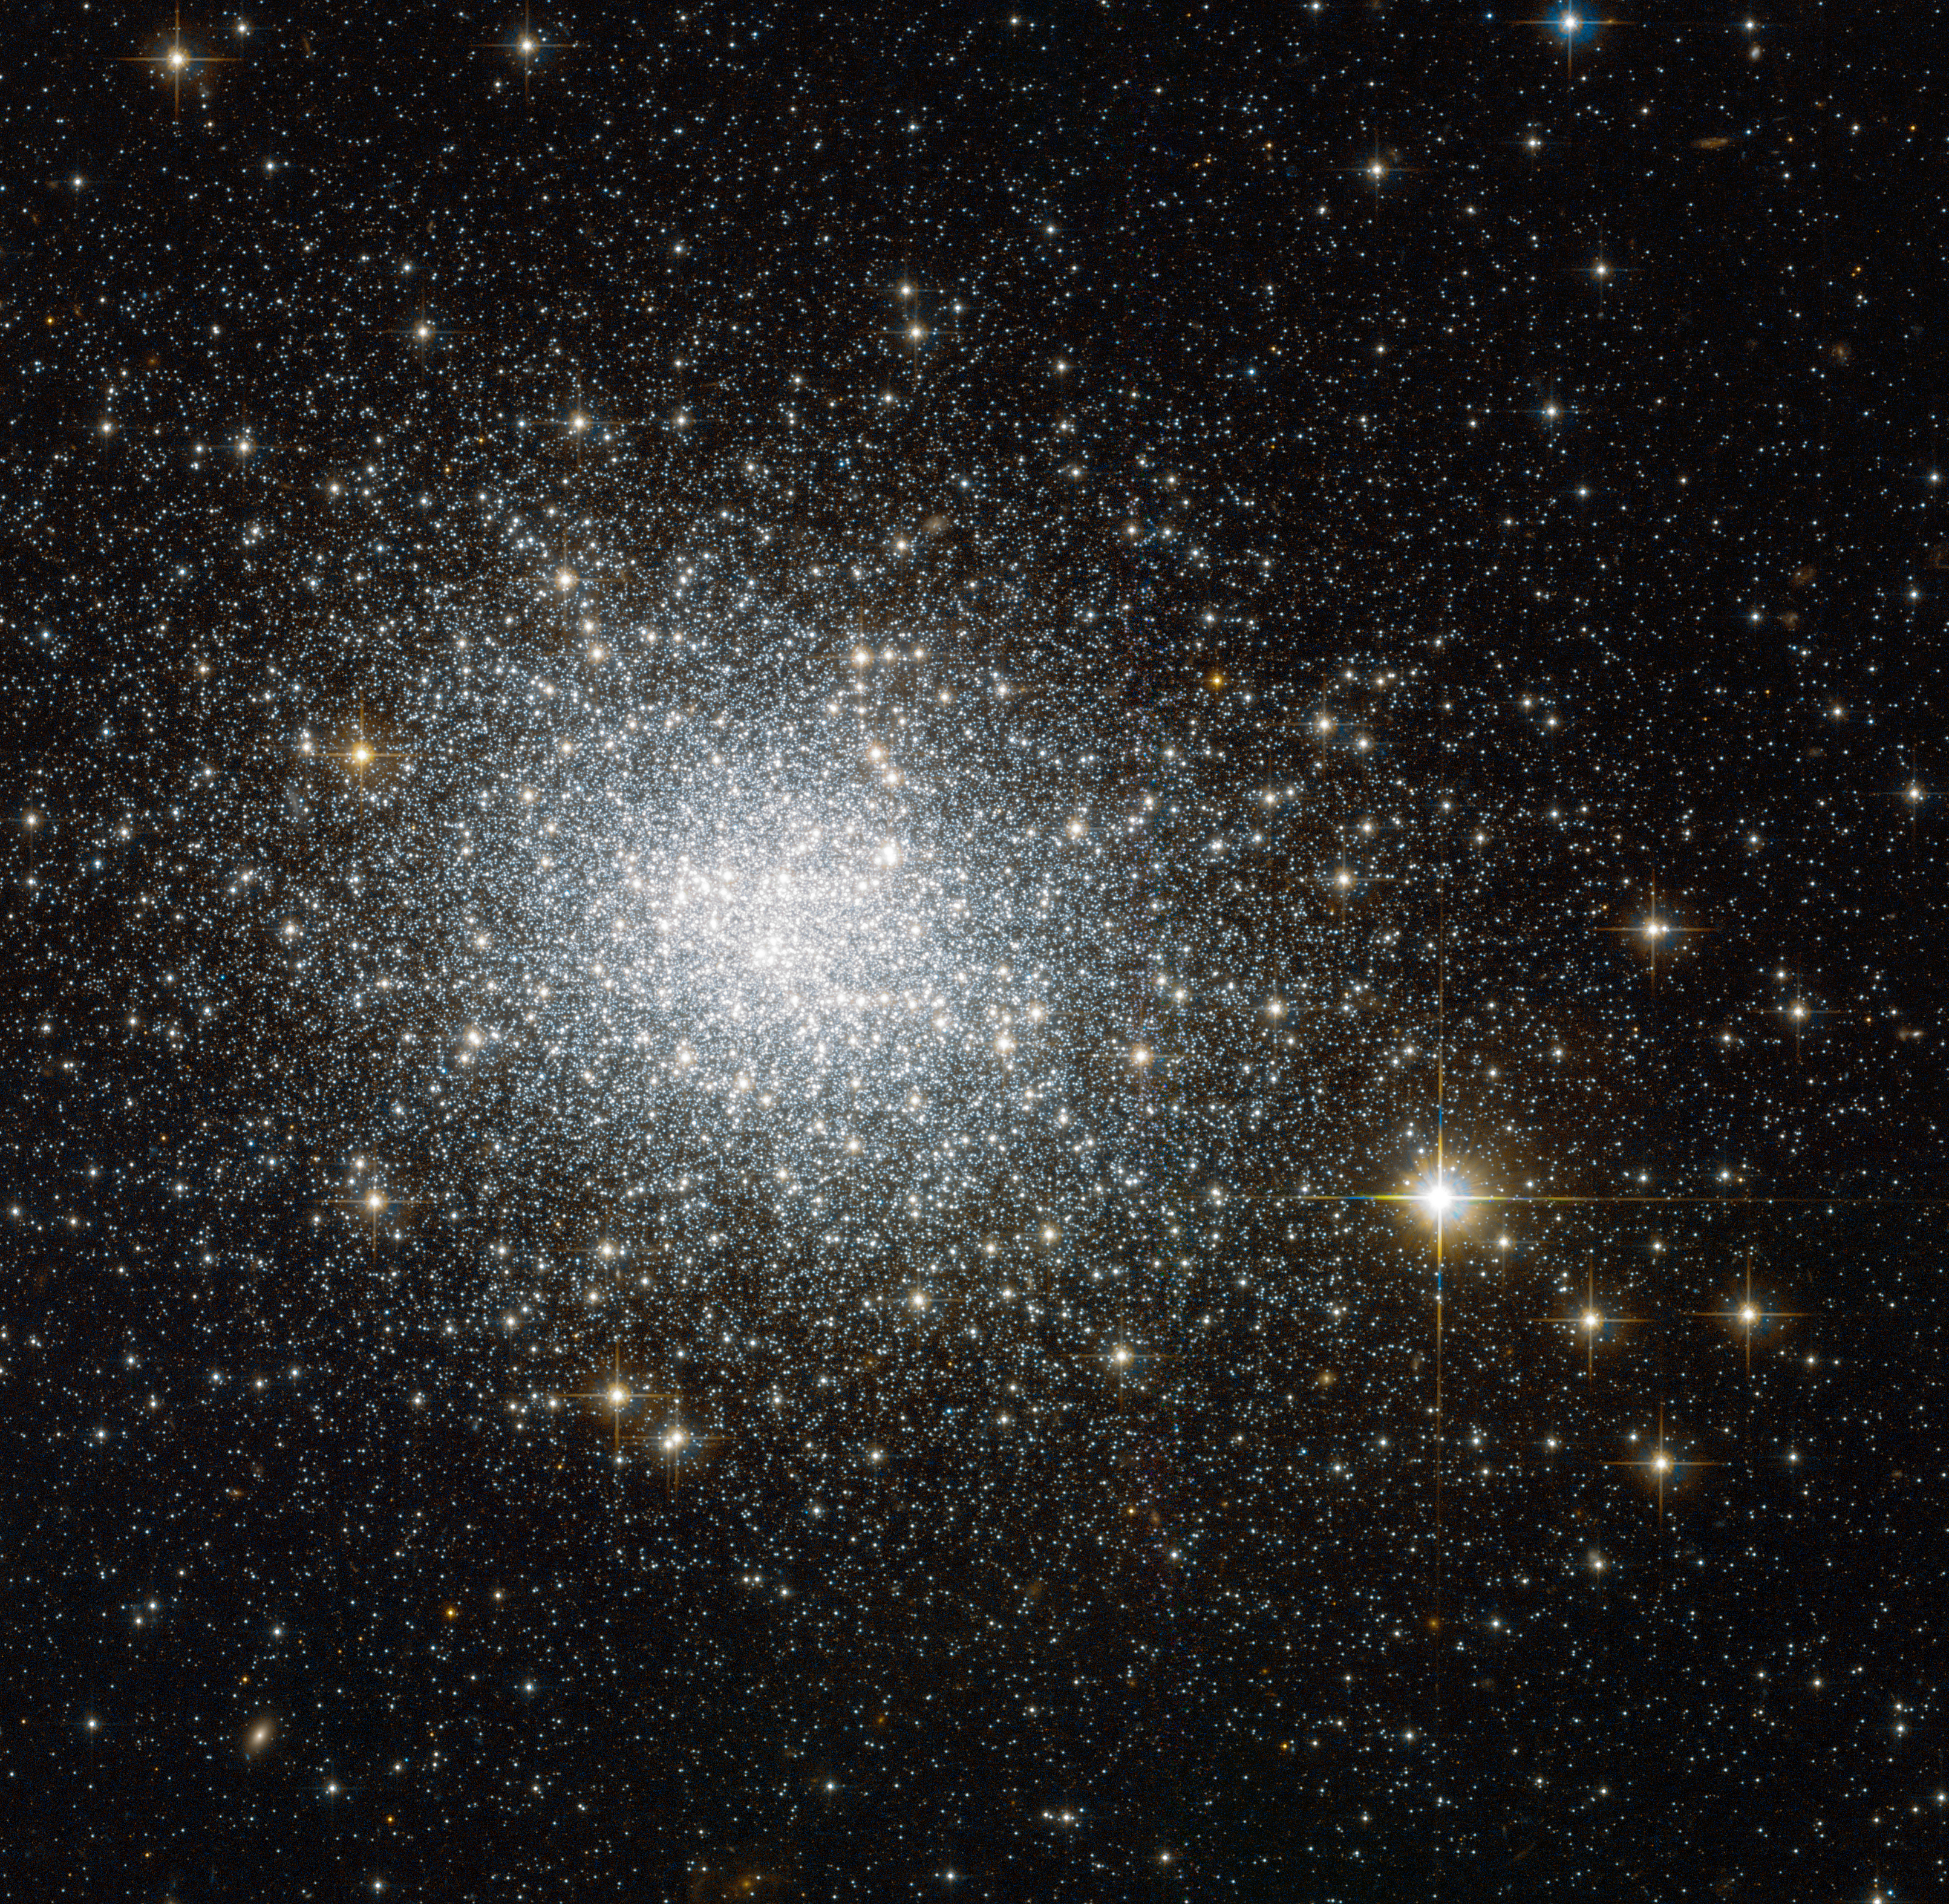

The oldest cluster in its cloud

This image shows NGC 121, a globular cluster in the constellation of Tucana (The Toucan). Globular clusters are big balls of old stars that orbit the centres of their galaxies like satellites — the Milky Way, for example, has around 150.

NGC 121 belongs to one of our neighbouring galaxies, the Small Magellanic Cloud (SMC). It was discovered in 1835 by English astronomer John Herschel, and in recent years it has been studied in detail by astronomers wishing to learn more about how stars form and evolve.

Stars do not live forever — they develop differently depending on their original mass. In many clusters, all the stars seem to have formed at the same time, although in others we see distinct populations of stars that are different ages. By studying old stellar populations in globular clusters, astronomers can effectively use them as tracers for the stellar population of their host galaxies. With an object like NGC 121, which lies close to the Milky Way, Hubble is able to resolve individual stars and get a very detailed insight.

NGC 121 is around 10 billion years old, making it the oldest cluster in its galaxy; all of the SMC's other globular clusters are 8 billion years old or younger. However, NGC 121 is still several billions of years younger than its counterparts in the Milky Way and in other nearby galaxies like the Large Magellanic Cloud. The reason for this age gap is not completely clear, but it could indicate that cluster formation was initially delayed for some reason in the SMC, or that NGC 121 is the sole survivor of an older group of star clusters.

This image was taken using Hubble’s Advanced Camera for Surveys (ACS). A version of this image was submitted to the Hubble’s Hidden Treasures image processing competition by contestant Stefano Campani.

Credit: ESA/Hubble & NASA Acknowlegement: Stefano Campani